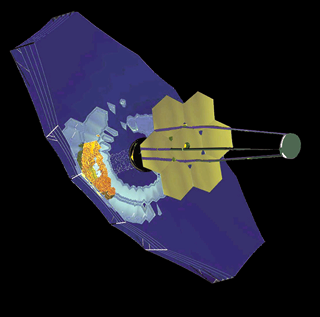

TRW design

Based on a proven technology for deploying large microwave antennae, the TRW design uses six hexagonal mirrors (10 feet or 3 meters between edges), which are stacked above a seventh central hexagonal mirror and are deployed and locked once the spacecraft reaches the L2 orbit. Like the Ball design, the TRW telescope can point to any target over more than half of the sky. The TRW sunshade design features many shields that are deployed with masts and wires.

Credit: NASA & ESA